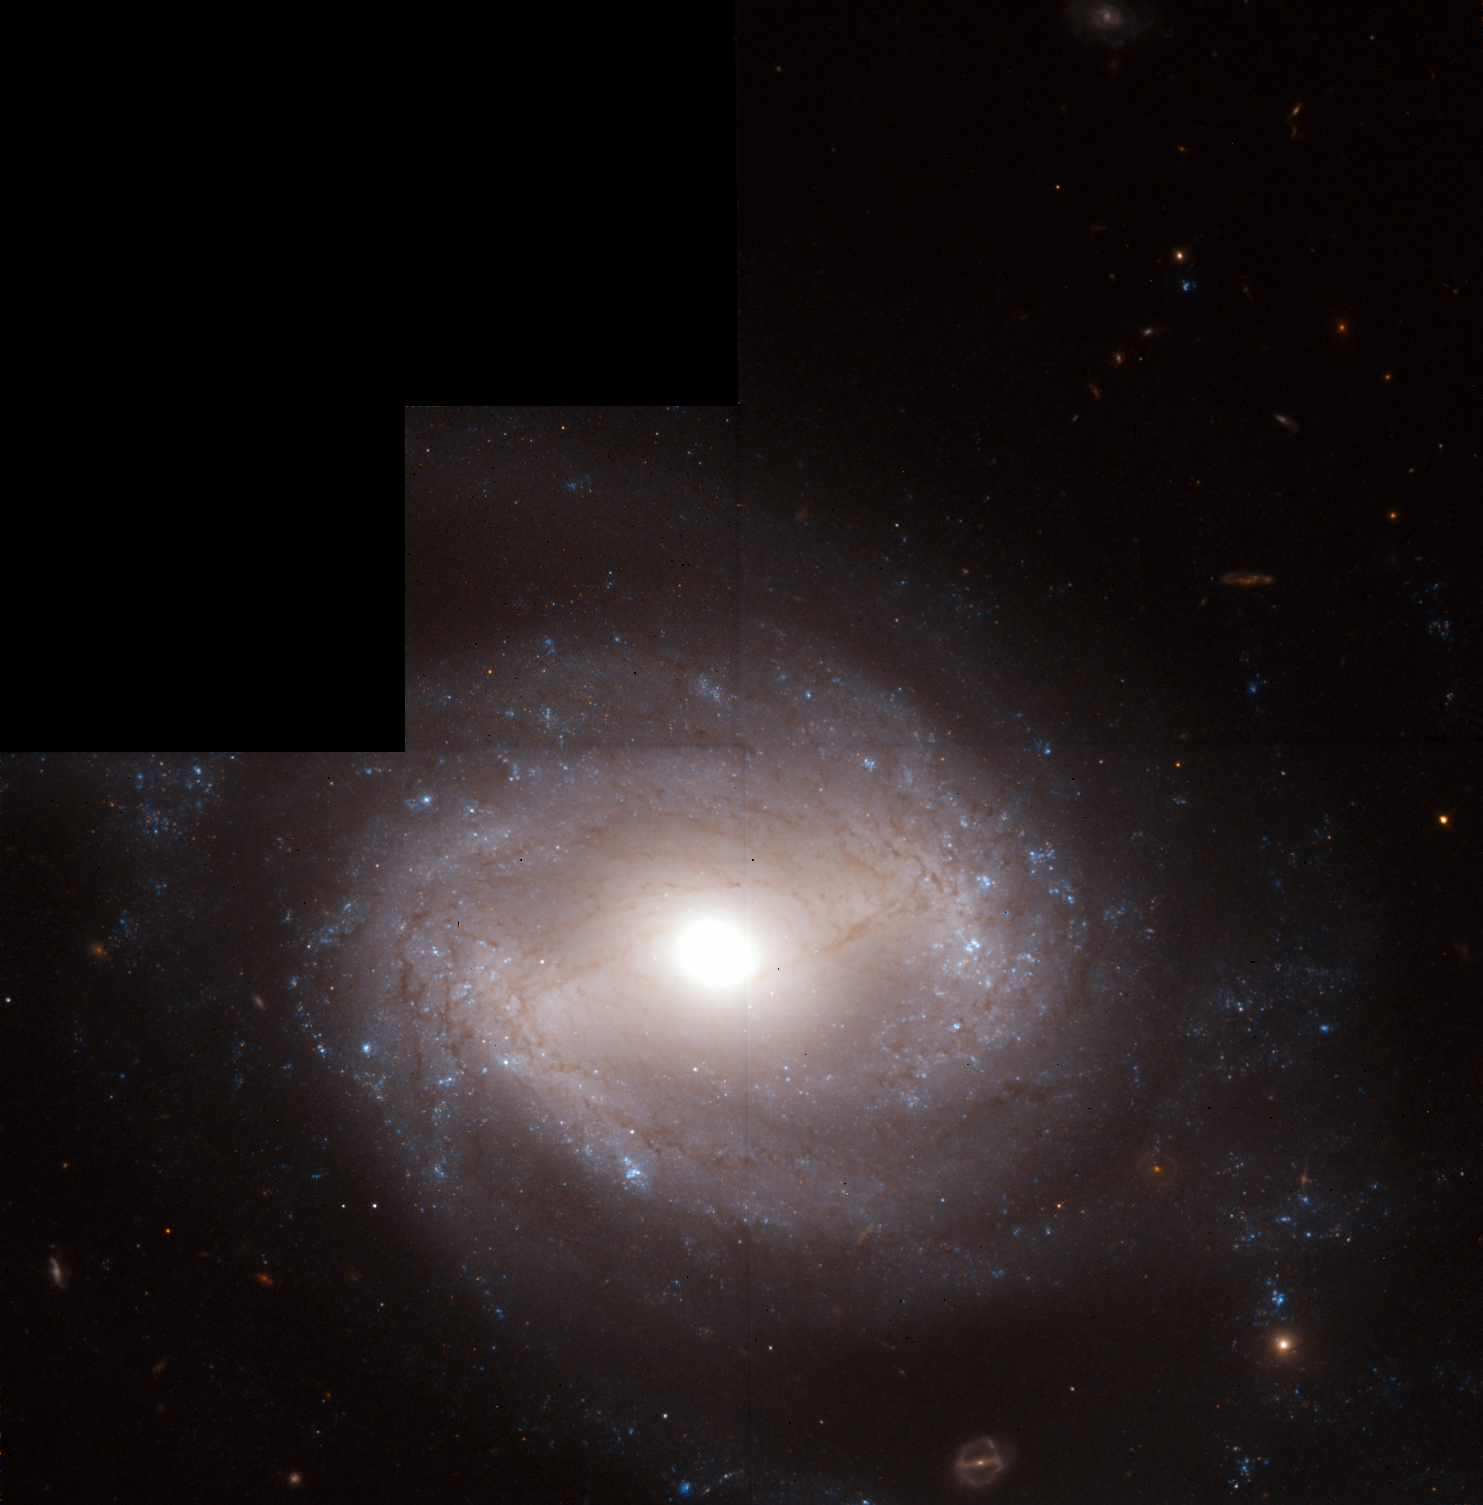

Distance Measurements to a Type-Ia Supernova-Bearing Galaxy

This Hubble Space Telescope image shows NGC 4639, a spiral galaxy located 78 million light-years away in the Virgo cluster of galaxies.

The blue dots in the galaxy's outlying regions indicate the presence of young stars. Among them are young, bright stars called Cepheids, which are used as reliable milepost markers to obtain accurate distances to nearby galaxies.

Credit: A. Sandage (Carnegie Observatories), A. Saha (Space Telescope Science Institute), G.A. Tammann, and L. Labhardt (Astronomical Institute, University of Basel), F.D. Macchetto and N. Panagia (Space Telescope Science Institute and European Space Agency) and NASA